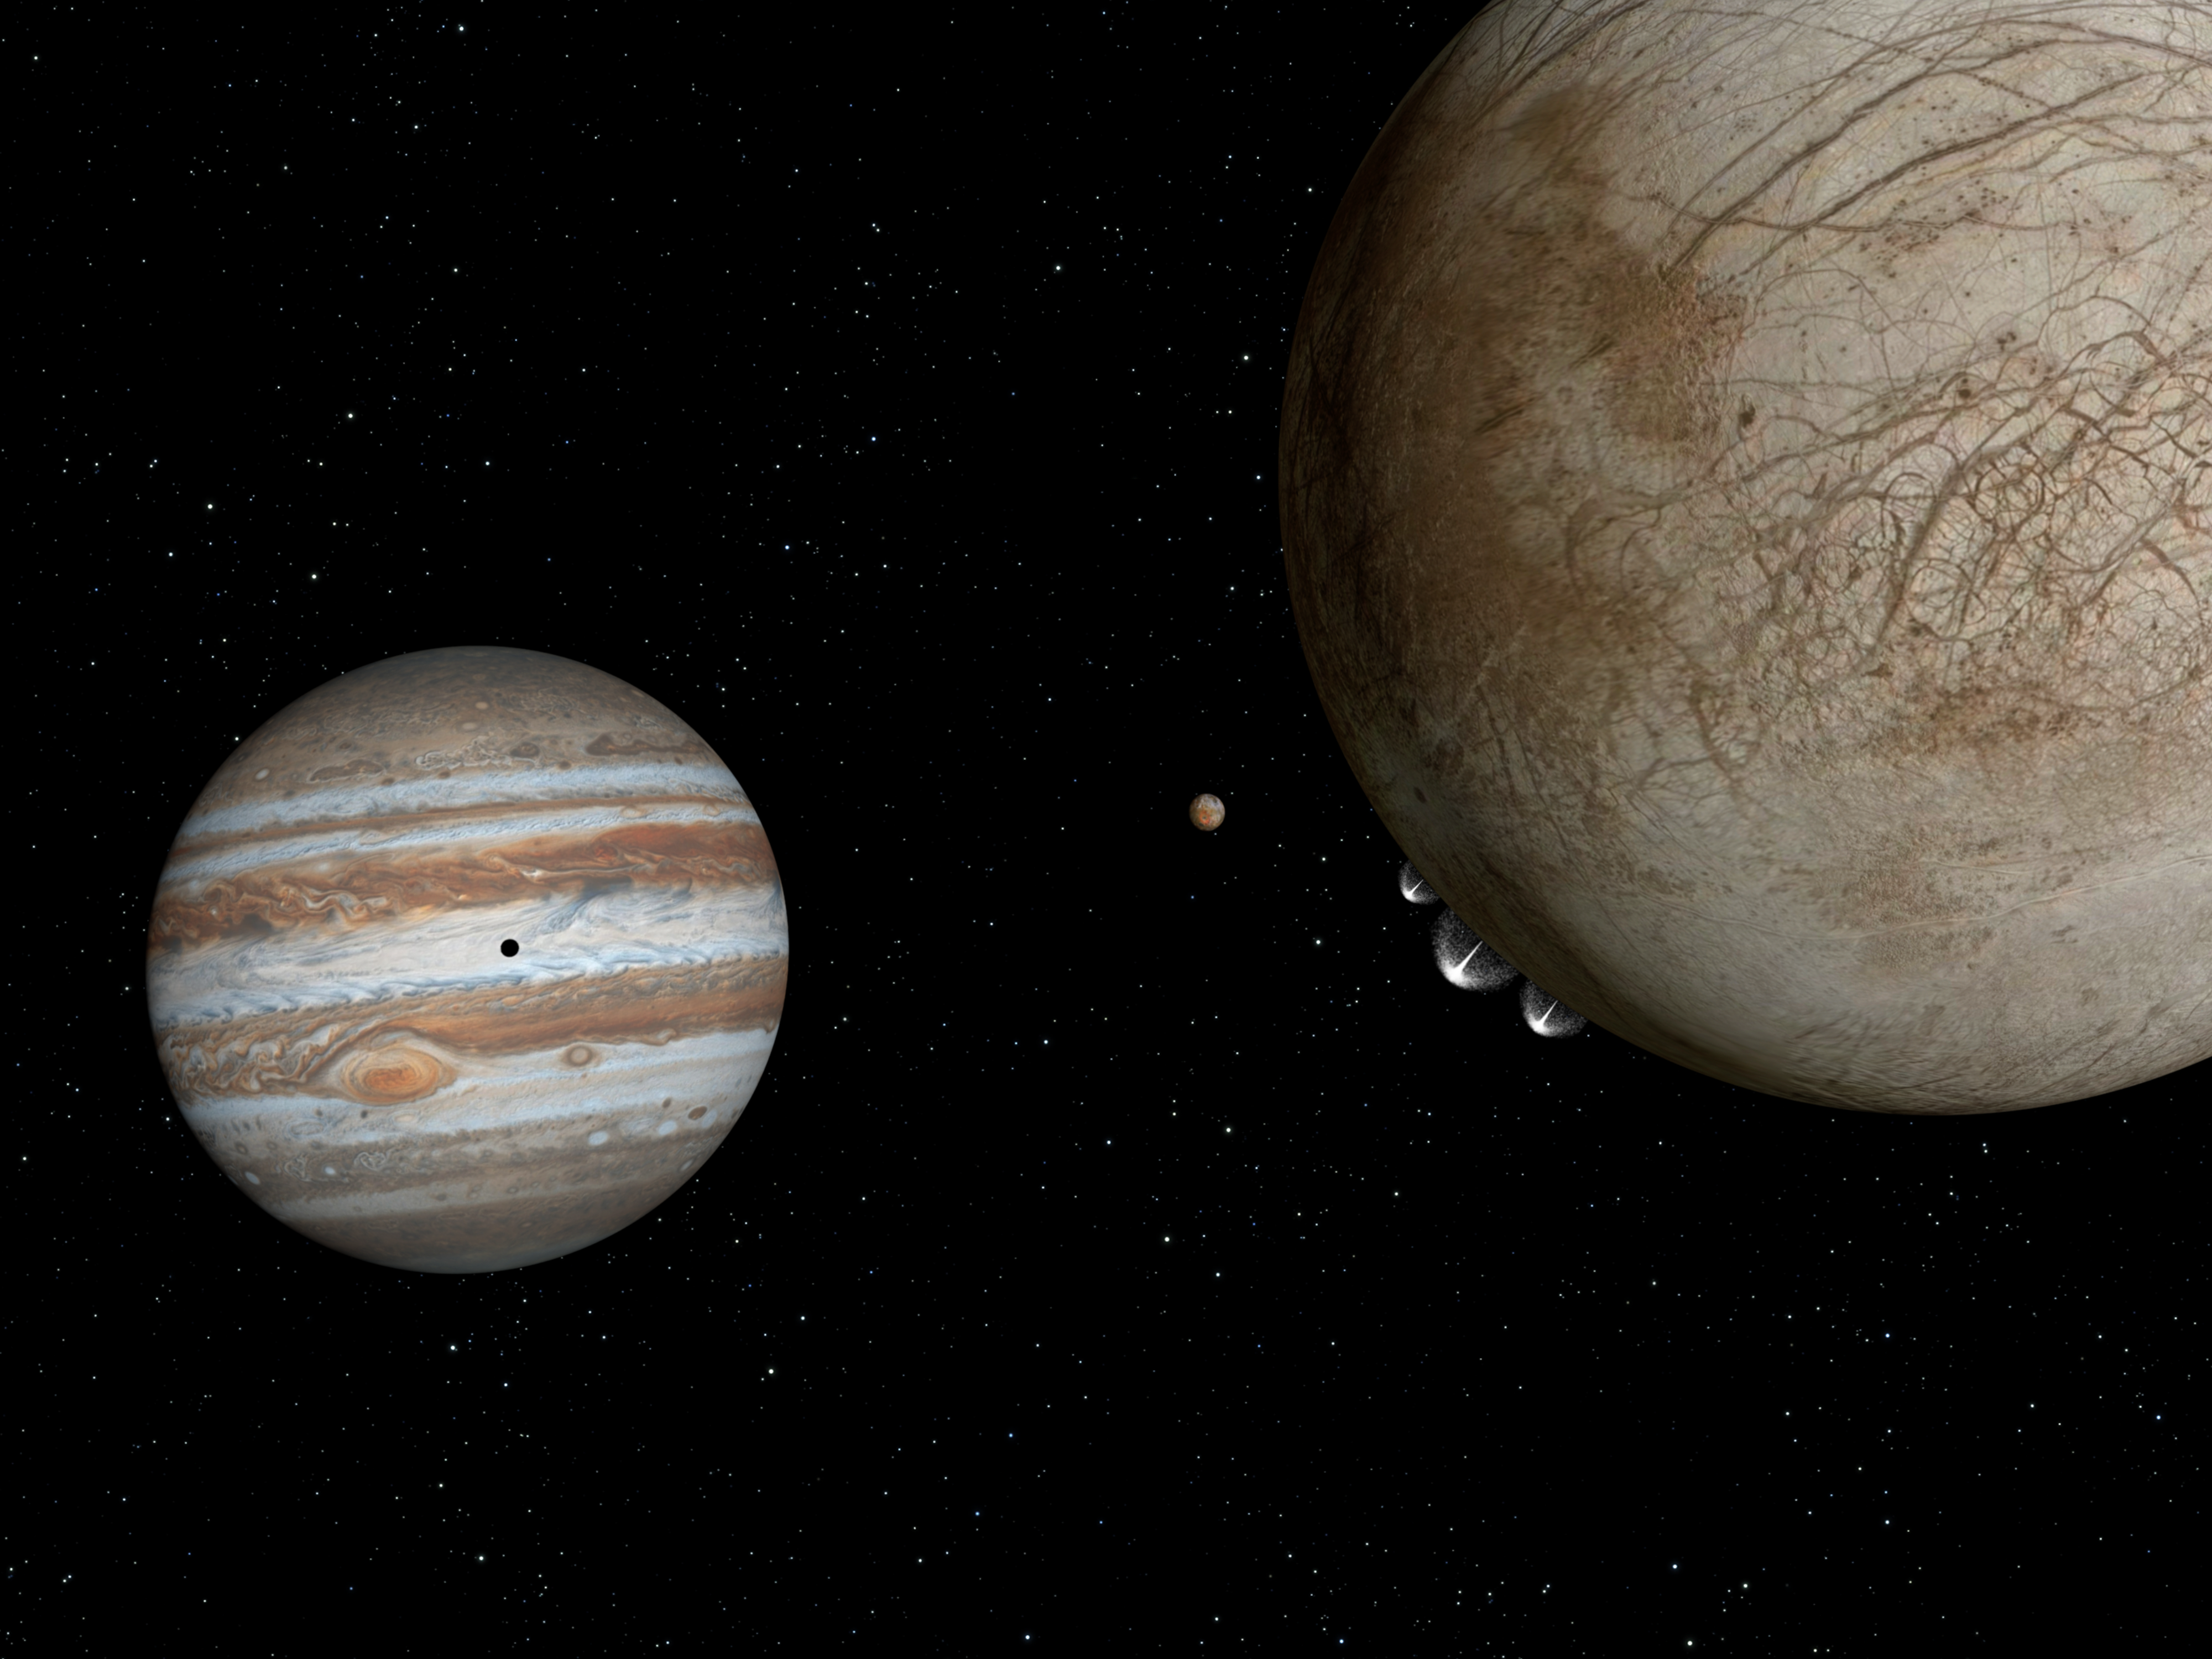

Artist’s impression of plumes on Europa

This artist’s impression shows the moon Europa, at right, with water-ice plumes erupting from its lower left limb at the 7 o'clock position. In the background, to the left, is Jupiter's orange, volcanic moon Io, and to the left of Io is Jupiter. Io's shadow appears in the centre of Jupiter's face, left.

Credit: NASA, ESA, and G. Bacon (STScI)